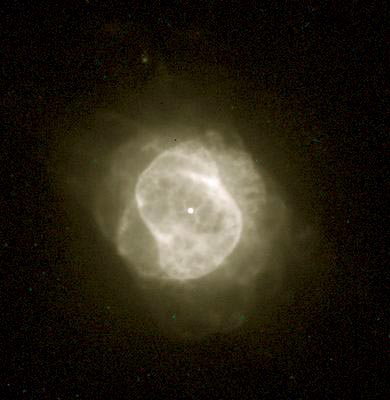

NGC 6884

This image is a part of the Hubble Gallery of Planetary Nebulae.

Credit: Howard Bond (ST ScI) and NASA/ESA